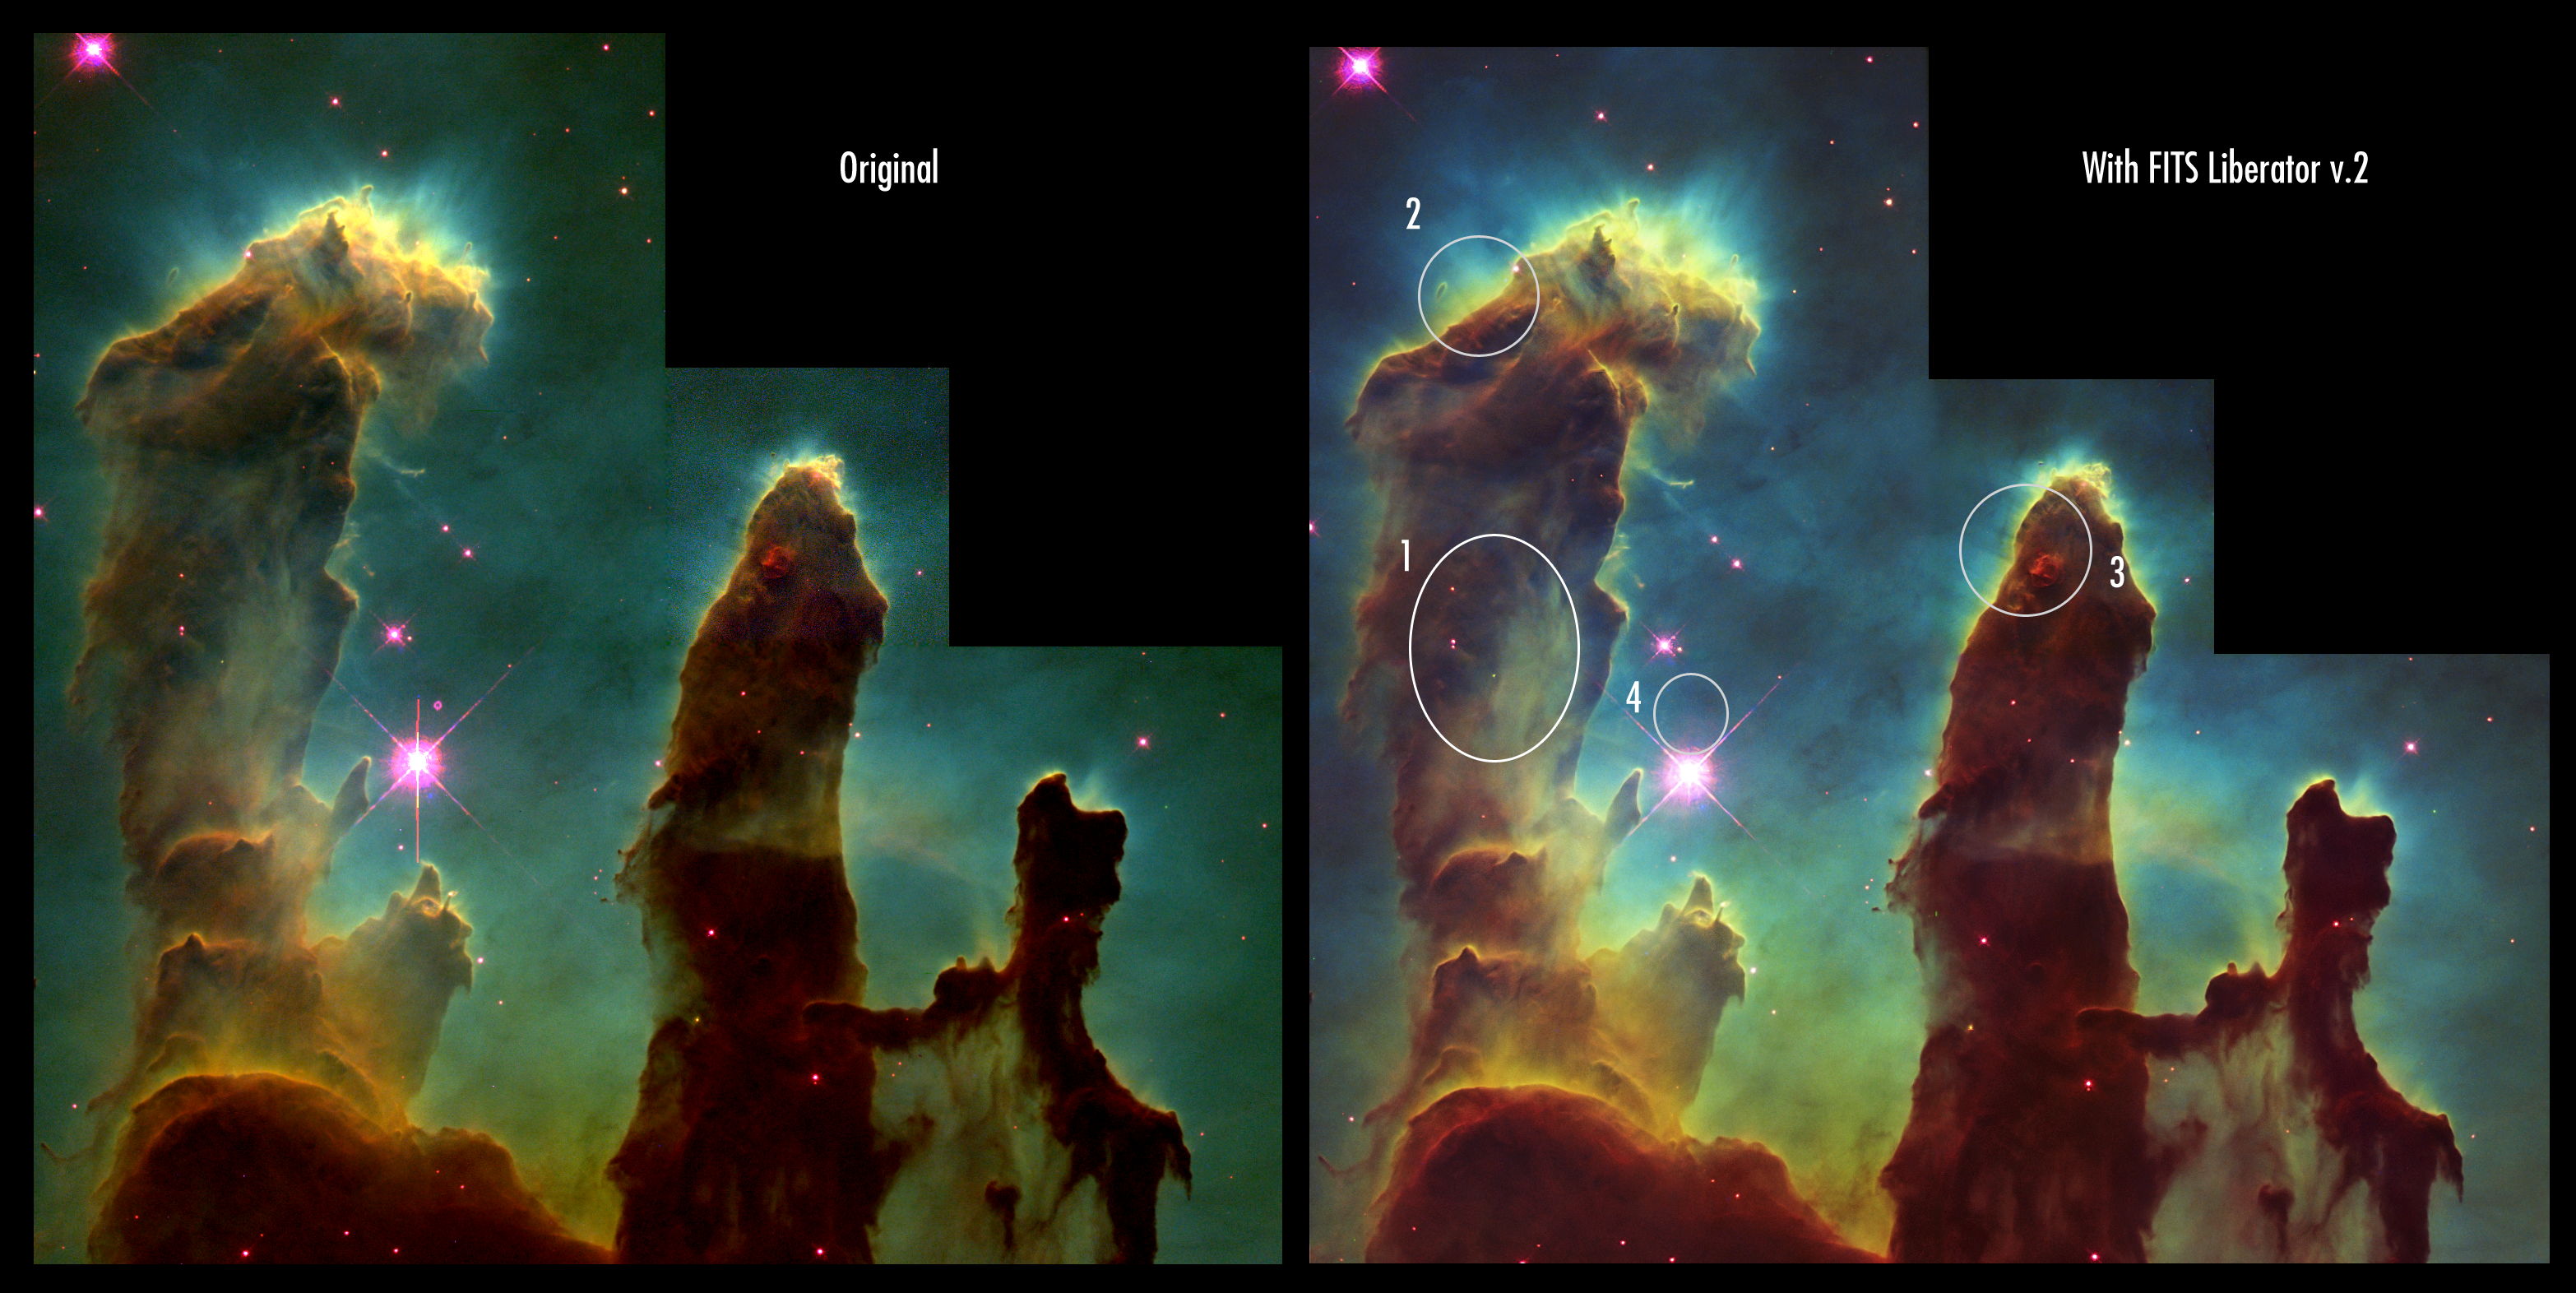

Make your own Pillars of Creation

With the release of version 2 of the FITS Liberator today it has become even easier to create stunning images. You can literally create "pretty pictures" like the iconic Hubble image "Pillars of Creation", seen here, in a matter of minutes.

The advantages of using FITS Liberator over previous image processing tools are indicated to the right: 1. Some added detail in the shadows, 2. Increased gamut (colour space, more nuances), 3. Slightly better noise characteristics and 4. Easier access to advanced cosmetic cleaning tools indicated by the removed ghosts.

The three-colour dataset used to create this image can be downloaded from: http://www.spacetelescope.org/projects/fits_liberator/eagledata.html

Credit: NASA/ESA & the ESA/ESO/NASA Photoshop FITS Liberator